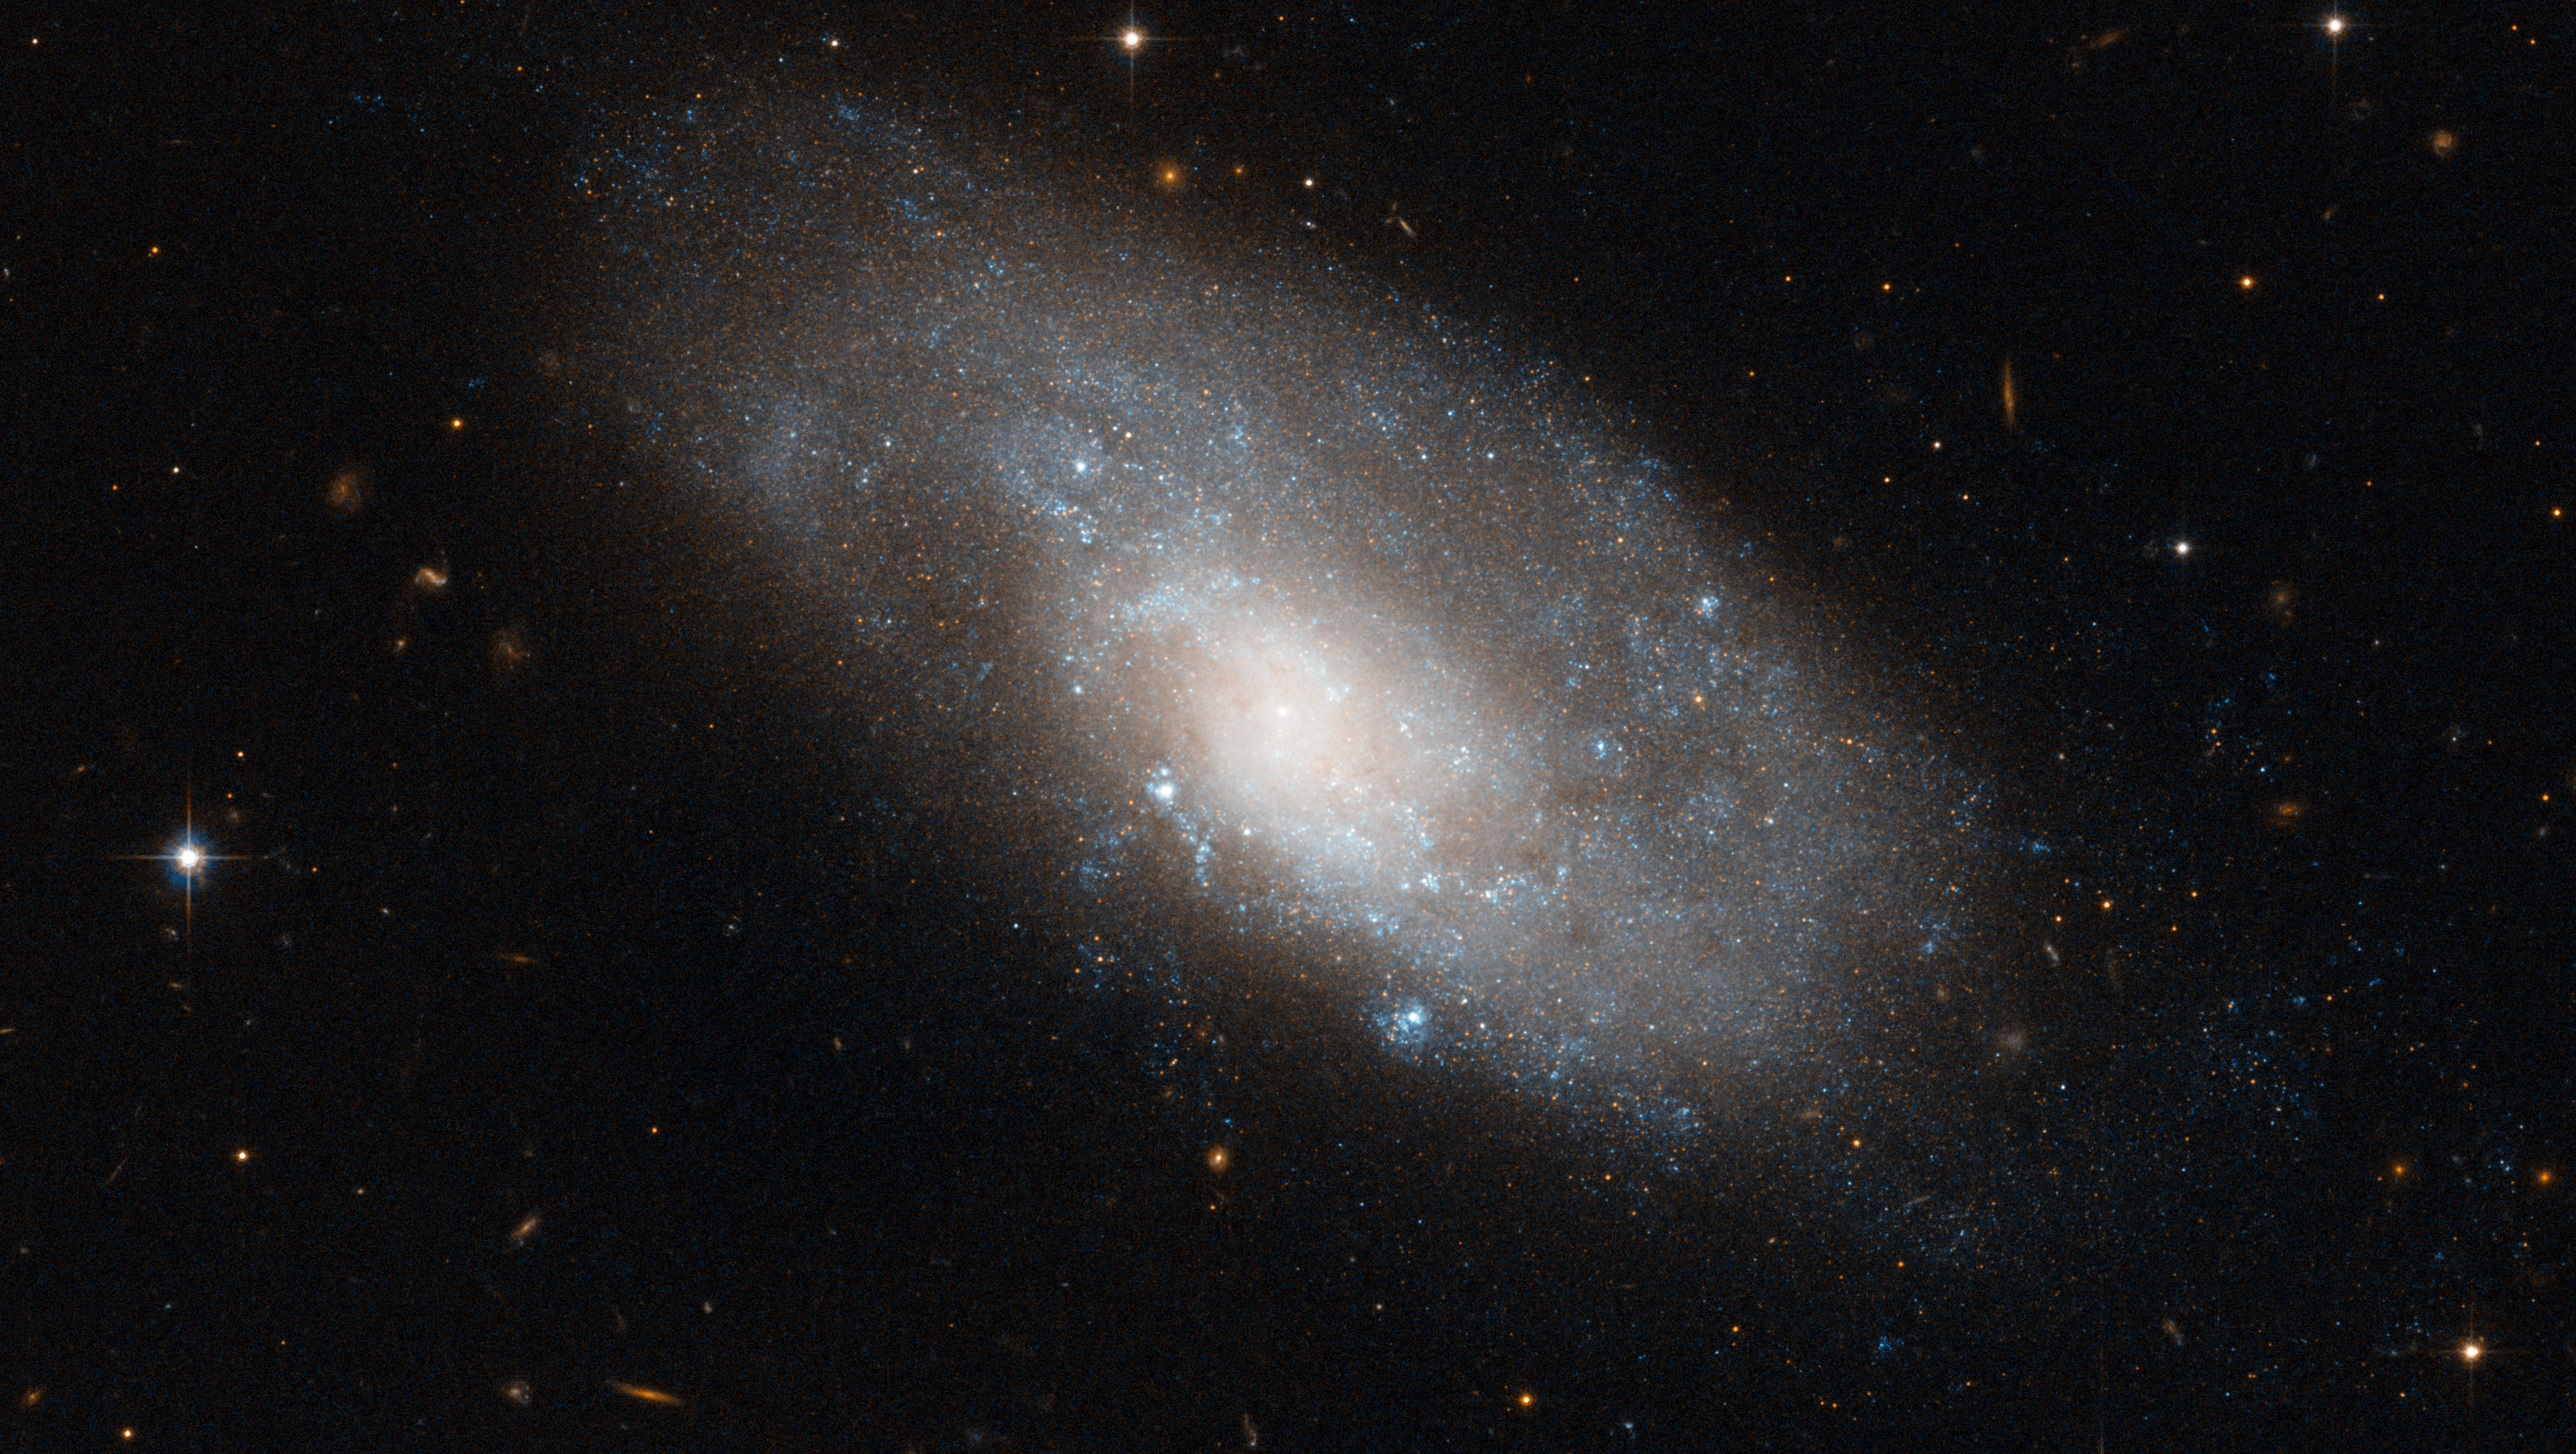

A spiral galaxy in Hydra

This image from the NASA/ESA Hubble Space Telescope shows NGC 4980, a spiral galaxy in the southern constellation of Hydra. The shape of NGC 4980 appears slightly deformed, something which is often a sign of recent tidal interactions with another galaxy. In this galaxy’s case, however, this appears not to be the case as there are no other galaxies in its immediate vicinity.

The image was produced as part of a research program into the nature of galactic bulges, the bright, dense, elliptical centres of galaxies. Classical bulges are relatively disordered, with stars orbiting the galactic centre in all directions. In contrast, in galaxies with so-called pseudobulges, or disc-type bulges, the movement of the spiral arms is preserved right to the centre of the galaxy.

Although the spiral structure is relatively subtle in this image, scientists have shown that NGC 4980 has a disc-type bulge, and its rotating spiral structure extends to the very centre of the galaxy.

Galaxies’ bright arms are the location of new star formation in spiral galaxies, and NGC 4980 is no exception. The galaxy’s arms are traced out by blue pockets of extremely hot newborn stars are visible across much of its disc. This sets it apart from the reddish galaxies visible in the background, which are distant elliptical galaxies made up of much older, and hence redder, stars.

This image is composed of exposures taken in visible and infrared light by Hubble’s Advanced Camera for Surveys. The image is approximately 3.3 by 1.5 arcminutes in size.

Credit: ESA/Hubble & NASA